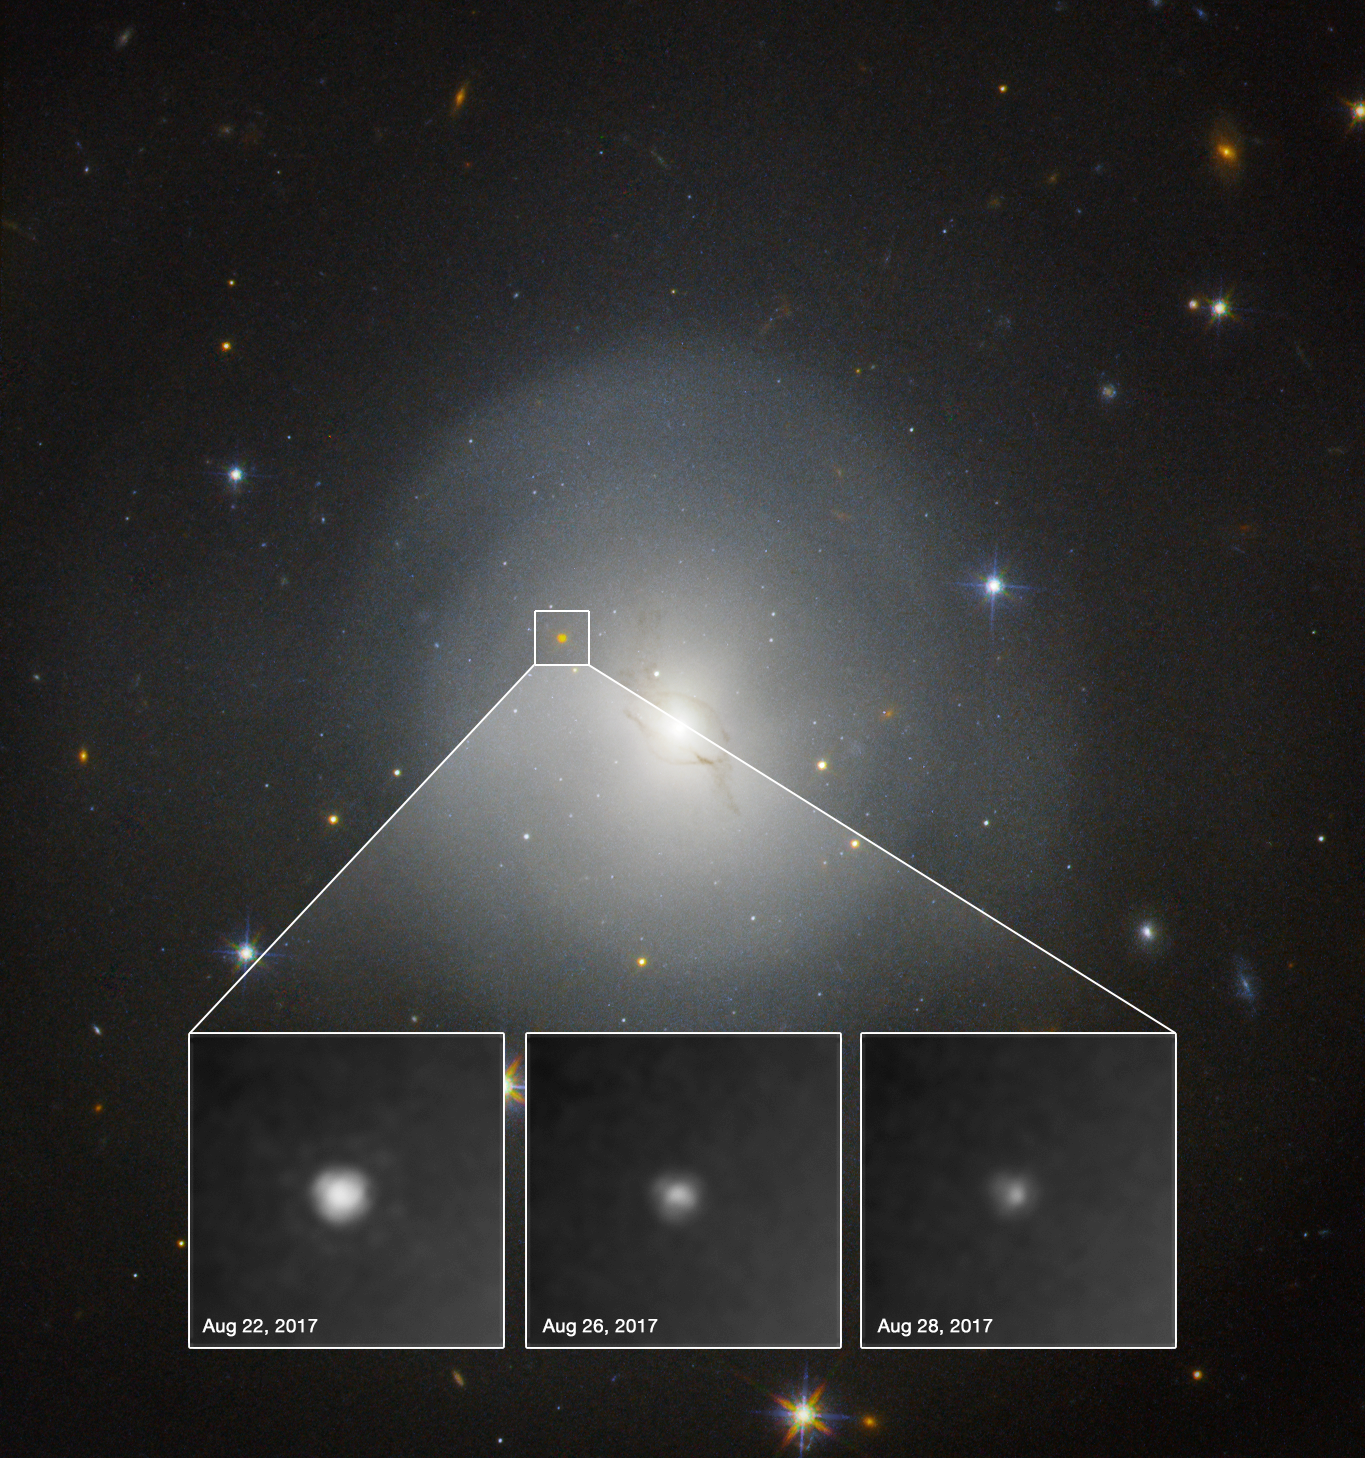

Hubble observes first kilonova

On 17 August 2017, the Laser Interferometer Gravitational-Wave Observatory (LIGO) and the Virgo Interferometer both detected gravitational waves from the collision between two neutron stars. Within 12 hours observatories had identified the source of the event within the lenticular galaxy NGC 4993, shown in this image gathered with the NASA/ESA Hubble Space Telescope. The associated stellar flare, a kilonova, is clearly visible in the Hubble observations. This is the first time the optical counterpart of a gravitational wave event was observed.

Hubble observed the kilonova gradually fading over the course of six days, as shown in these observations taken in between 22 and 28 August (insets).

Credit: NASA and ESA. Acknowledgment: A.J. Levan (U. Warwick), N.R. Tanvir (U. Leicester), and A. Fruchter and O. Fox (STScI)